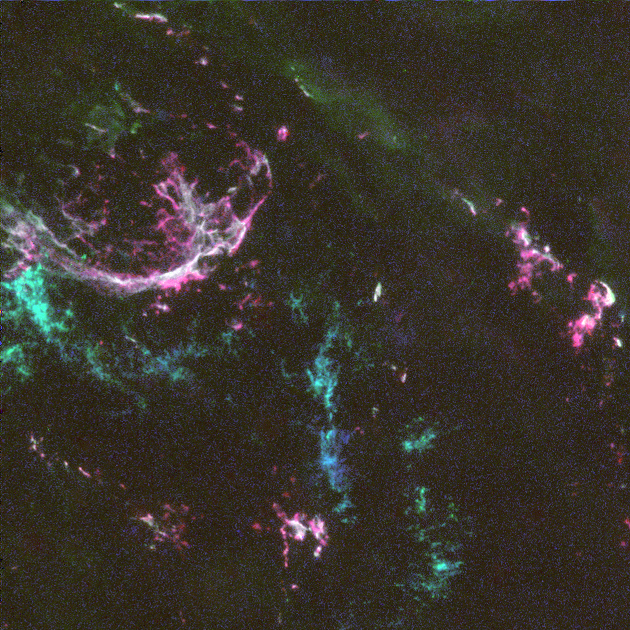

Oxygen-Rich Supernova

This is a Hubble Space Telescope image of the tattered debris of a star that exploded 3, 000 years ago as a supernova. This supernova remnant, called N132D, lies 169, 000 light-years away in the satellite galaxy, the Large Magellanic Cloud.

Credit: Jon A. Morse (STScI), William P. Blair (PI; JHU), Michael A. Dopita (MSSSO), Robert P. Kirshner (Harvard), Knox S. Long (STScI), Jon A. Morse (STScI), John C. Raymond (SAO), Ralph S. Sutherland (UC-Boulder), P. Frank Winkler (Middlebury) and NASA/ESA